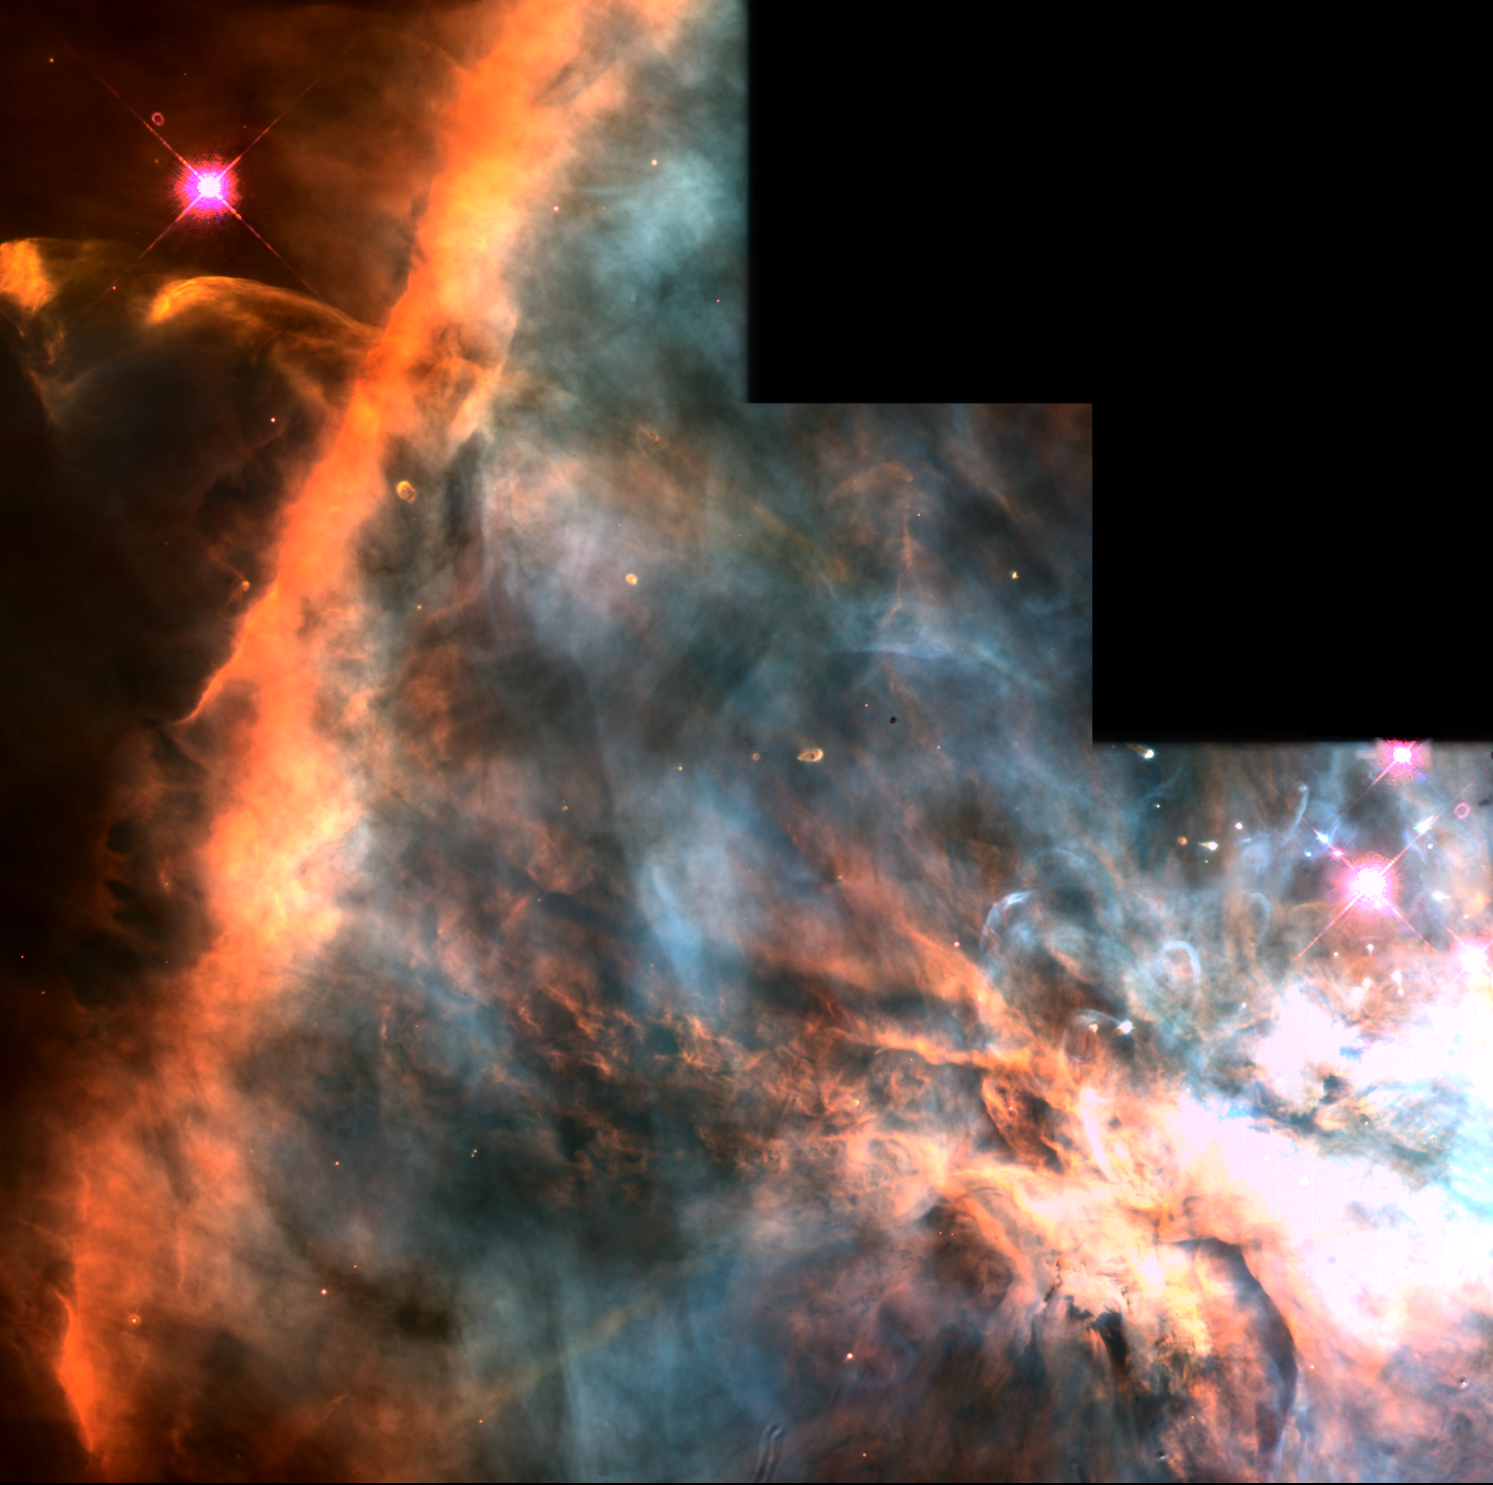

The Orion Nebula

This is one of the nearest regions of very recent star formation (300, 000 years ago). The nebula is a giant gas cloud illuminated by the brightest of the young hot stars at the top of the picture. Many of the fainter young stars are surrounded by disks of dust and gas that are slightly more than twice the diameter of the Solar System.

Credit: C.R. O'Dell/Rice University NASA/ESA